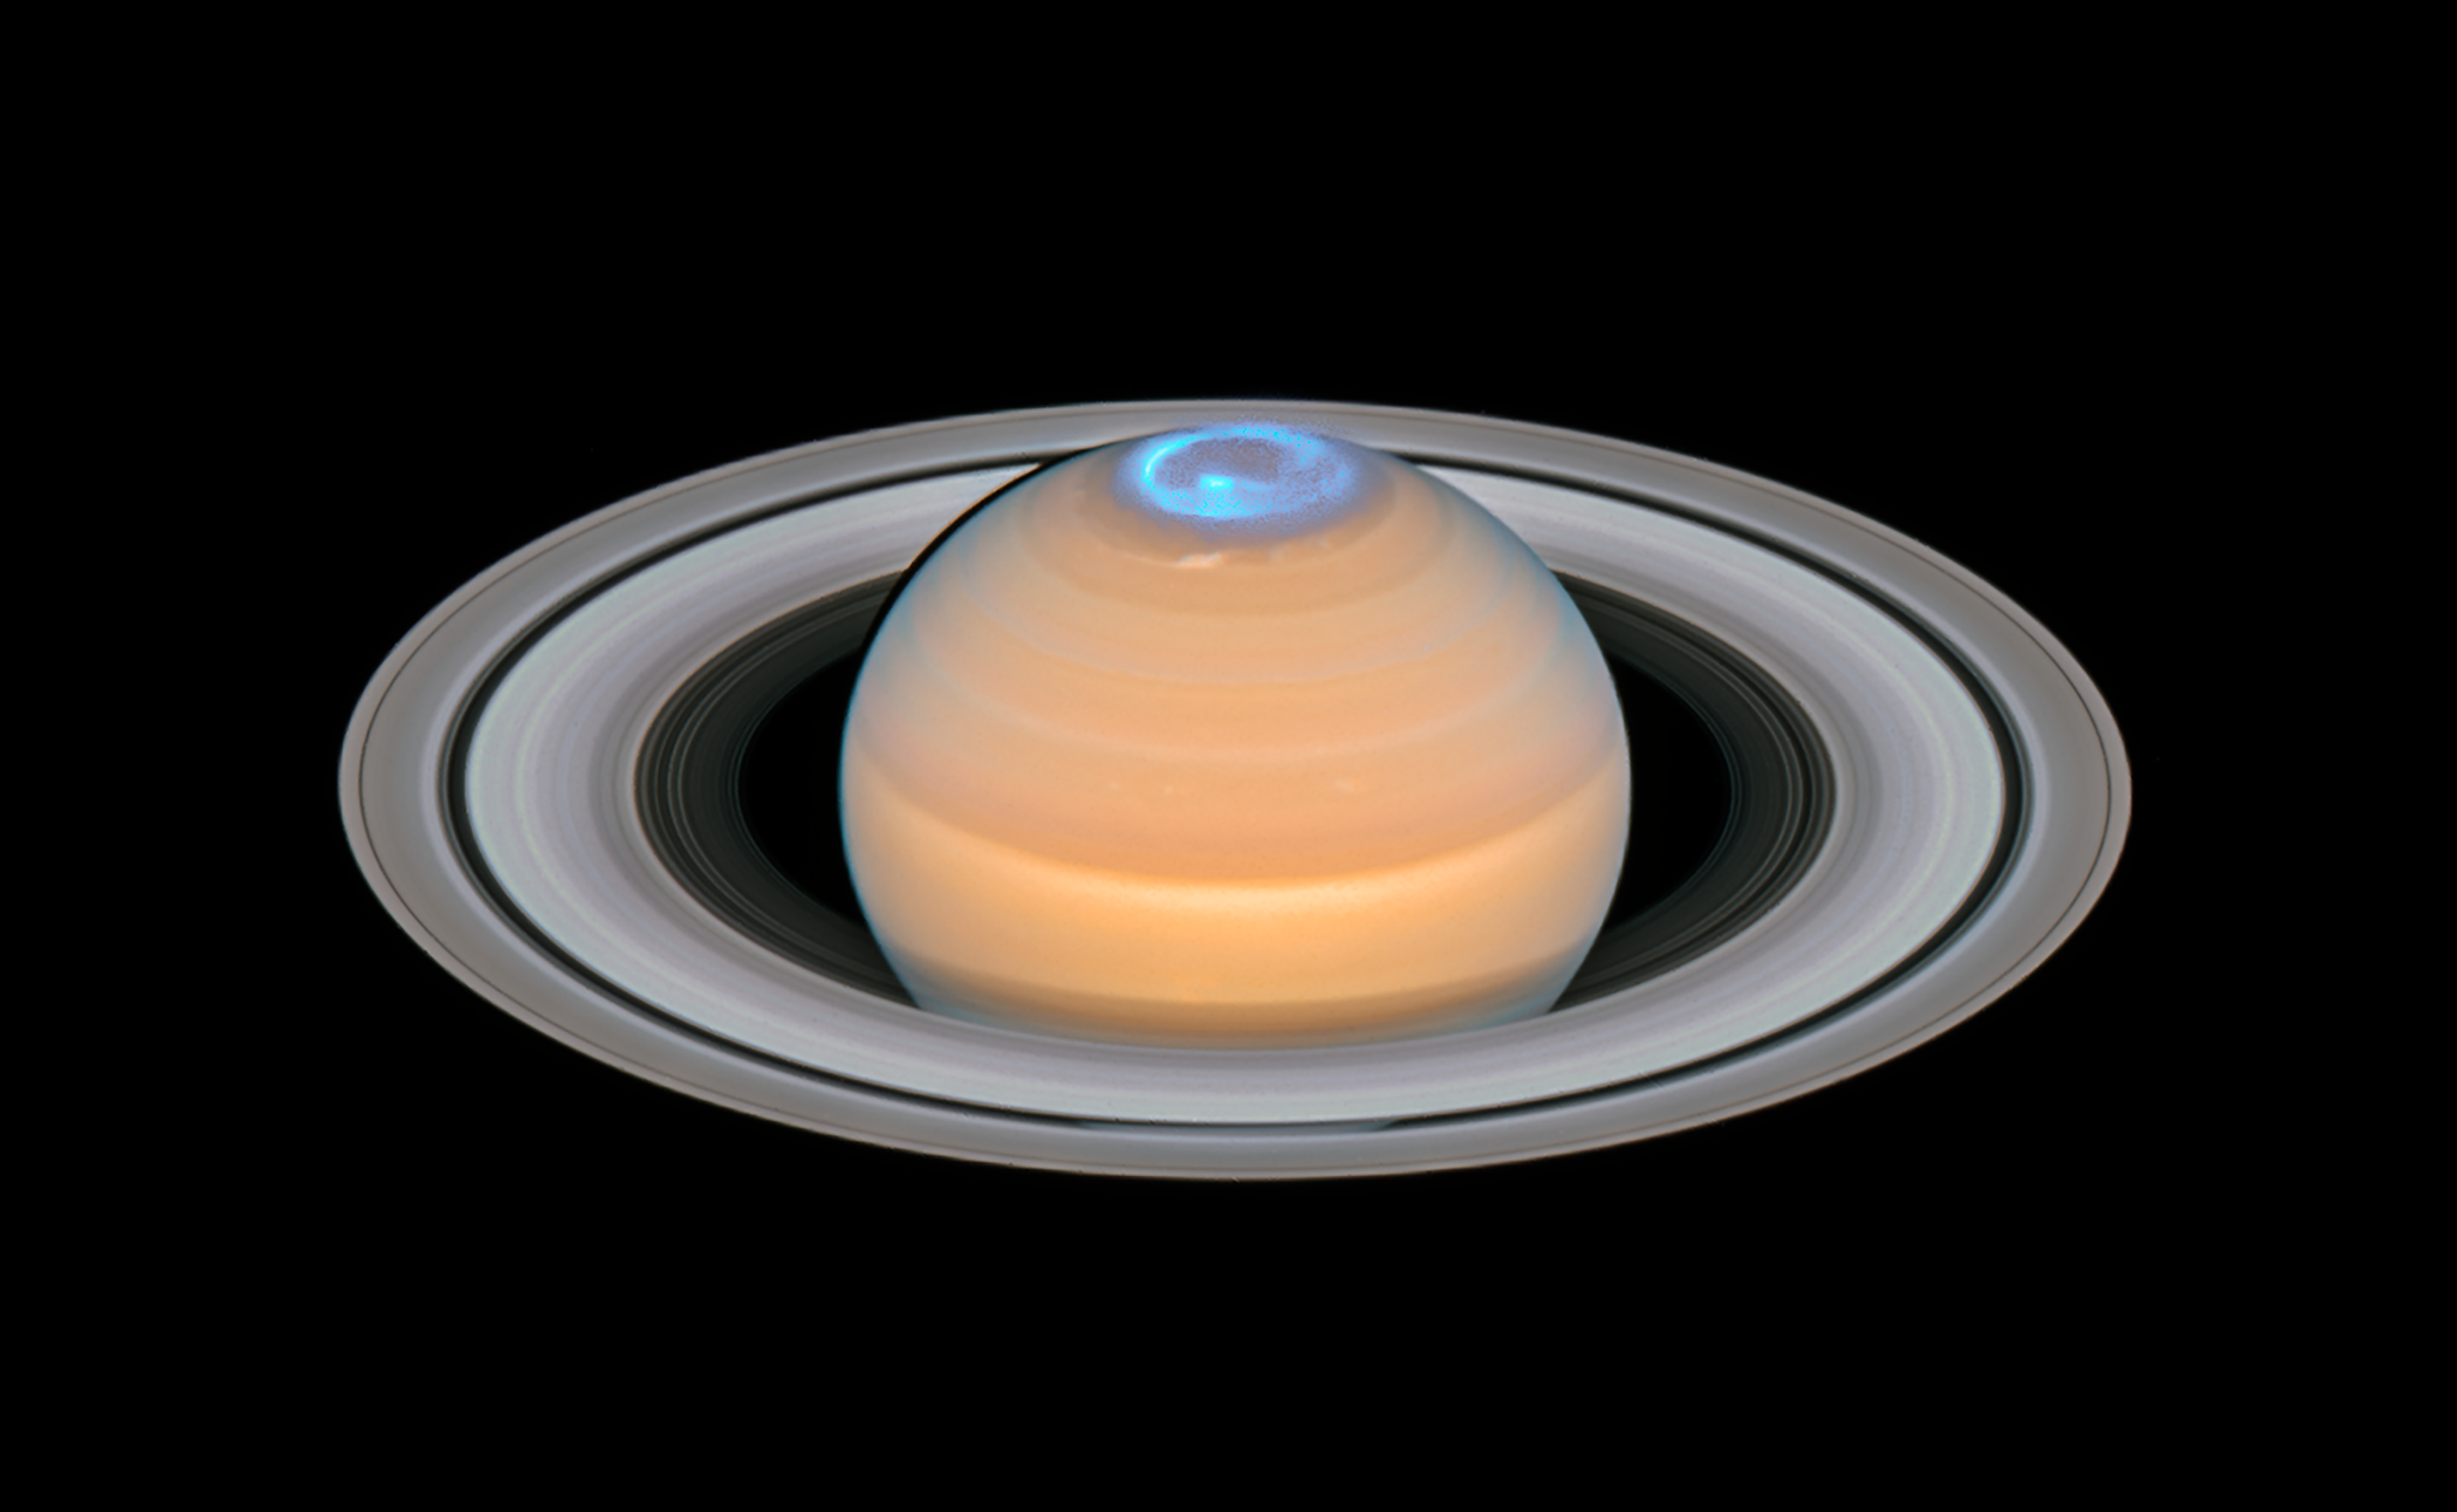

Saturn and its northern auroras (composite image)

This image is a composite of observations made of Saturn in early 2018 in the optical and of the auroras on Saturn’s north pole region, made in 2017.

In contrast to the auroras on Earth the auroras on Saturn are mainly visible in the ultraviolet — a part of the electromagnetic spectrum blocked by Earth’s atmosphere — and therefore astronomers have to rely on space telescopes like the NASA/ESA Hubble Space Telescope to study them.

Credit: ESA/Hubble, NASA, A. Simon (GSFC) and the OPAL Team, J. DePasquale (STScI), L. Lamy (Observatoire de Paris)